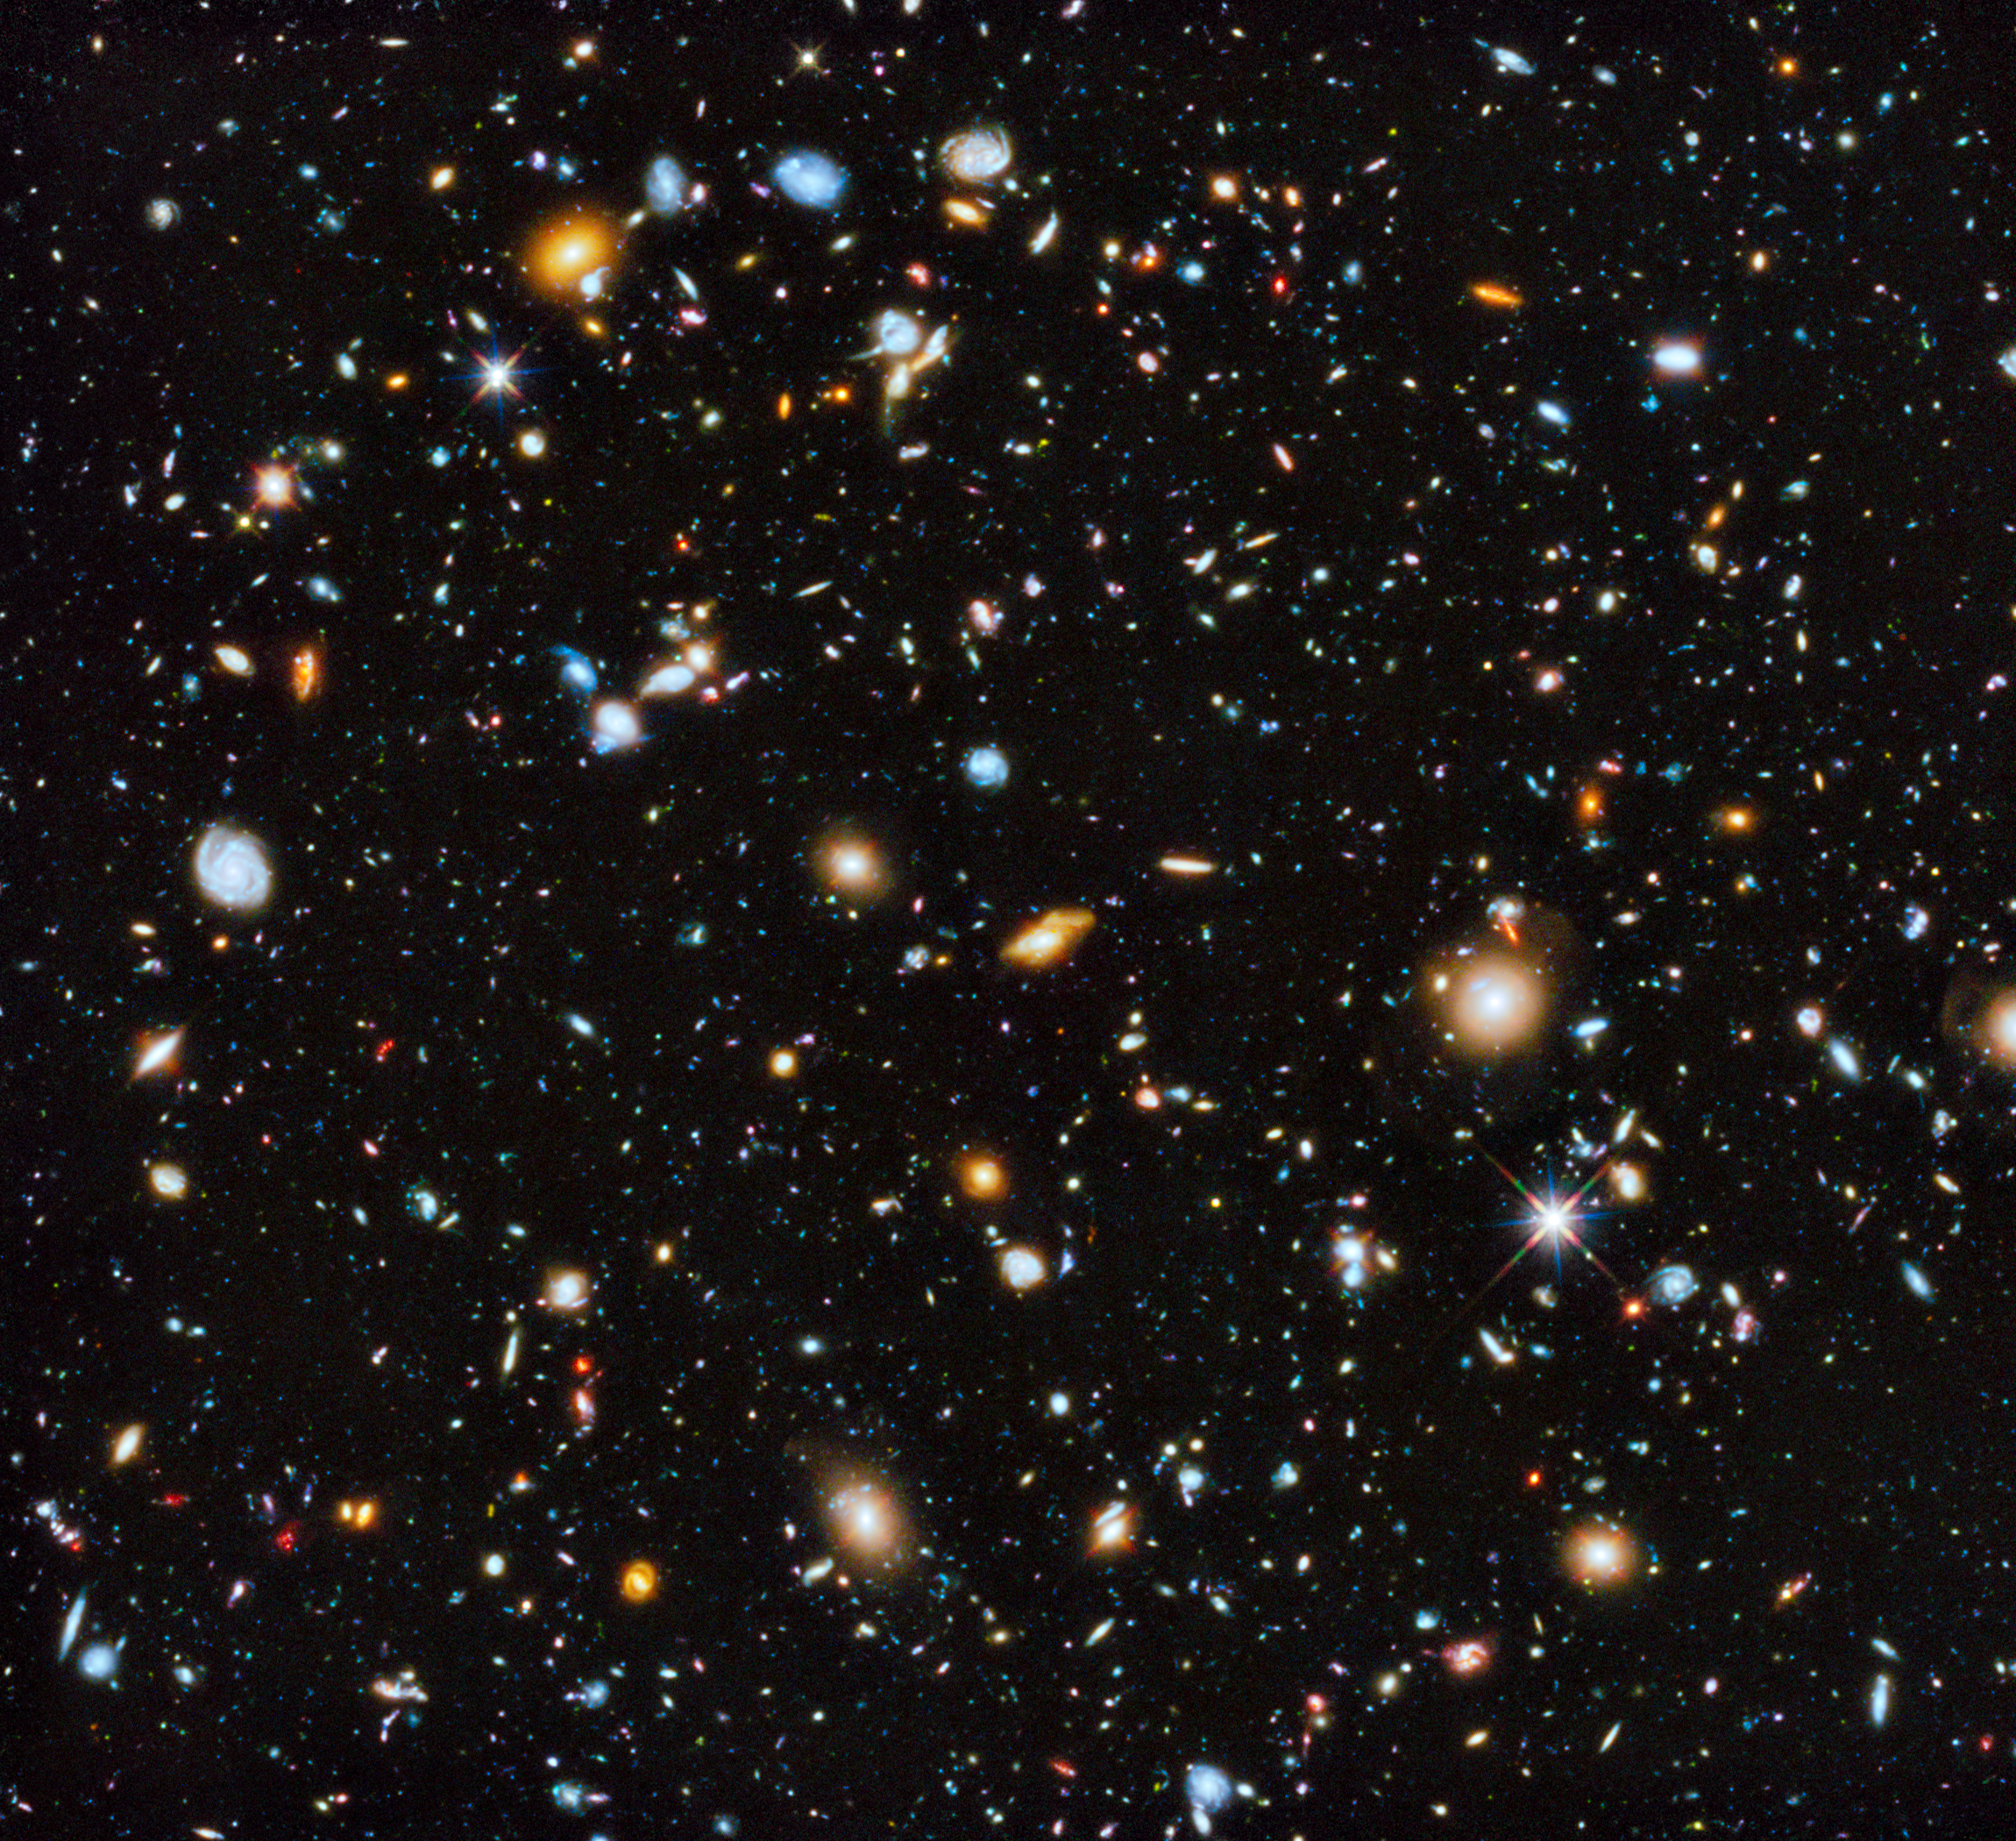

Hubble’s colourful view of the Universe

Astronomers using the Hubble Space Telescope have captured the most comprehensive picture ever assembled of the evolving Universe — and one of the most colourful. The study is called the Ultraviolet Coverage of the Hubble Ultra Deep Field (UVUDF) project.

Credit: NASA, ESA, H. Teplitz and M. Rafelski (IPAC/Caltech), A. Koekemoer (STScI), R. Windhorst (Arizona State University), and Z. Levay (STScI)